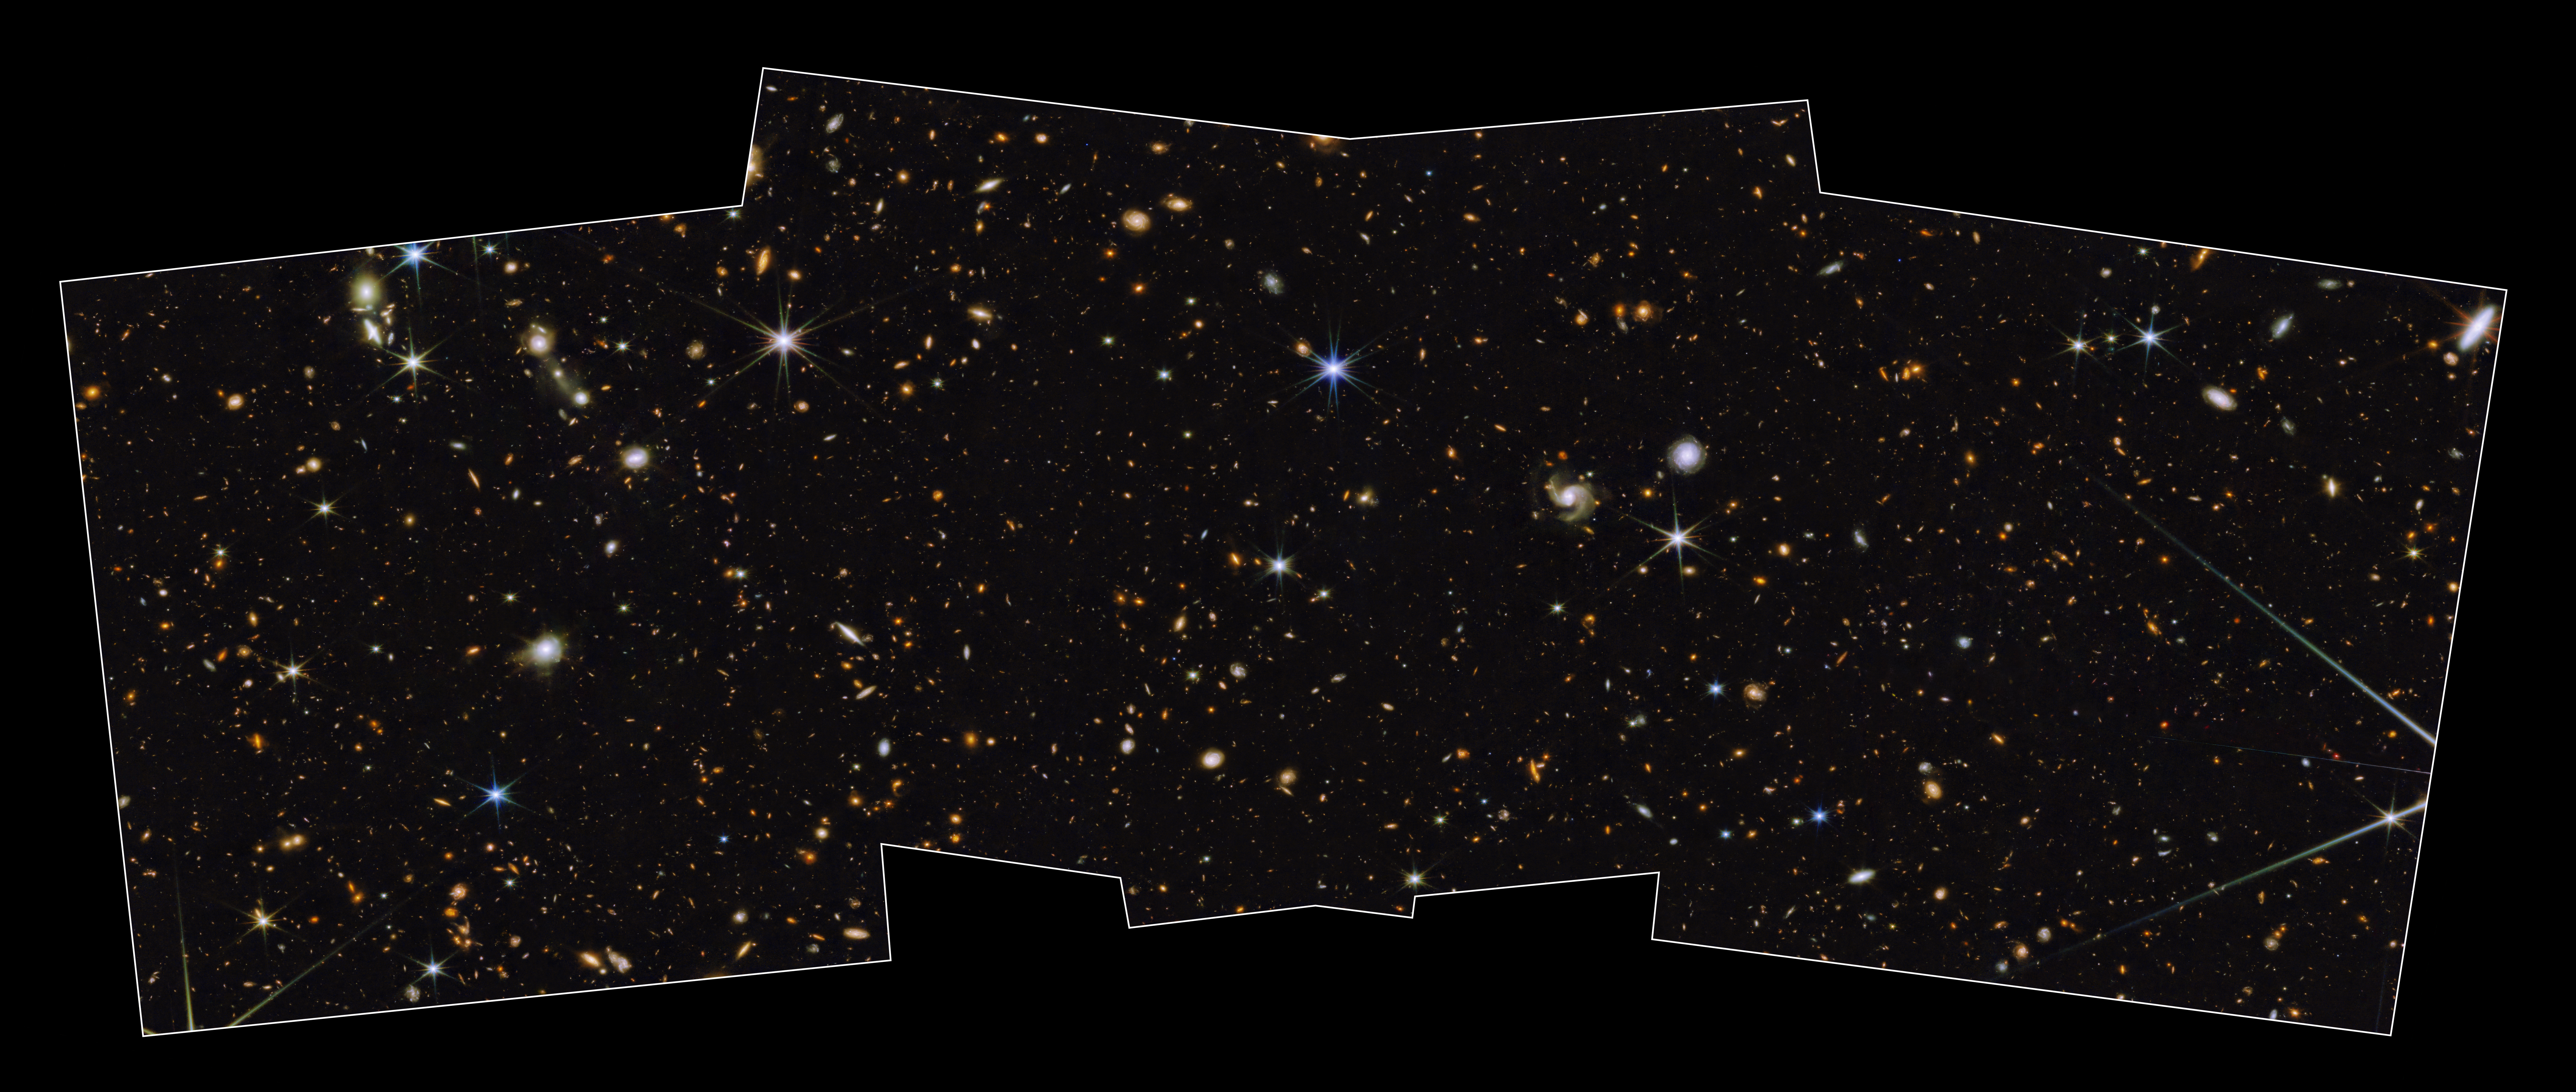

North Ecliptic Pole Time Domain Field

The NASA/ESA/CSA James Webb Space Telescope has captured one of the first medium-deep wide-field images of the cosmos, featuring a region of the sky known as the North Ecliptic Pole. The image, which accompanies a paper published in the Astronomical Journal, is from the Prime Extragalactic Areas for Reionization and Lensing Science (PEARLS) GTO program.

“Medium-deep” refers to the faintest objects that can be seen in this image, which are about 29th magnitude (1 billion times fainter than what can be seen with the unaided eye), while “wide-field” refers to the total area that will be covered by the program, about one-twelfth the area of the full moon. The image is composed of eight different colors of near-infrared light captured by Webb’s Near-Infrared Camera (NIRCam), augmented with three colors of ultraviolet and visible light from the NASA/ESA Hubble Space Telescope. This beautiful color image unveils in unprecedented detail and to exquisite depth a universe full of galaxies to the furthest reaches, many of which were previously unseen by Hubble or the largest ground-based telescopes, as well as an assortment of stars within our own Milky Way galaxy. The NIRCam observations will be combined with spectra obtained with Webb’s Near-Infrared Imager and Slitless Spectrograph (NIRISS), allowing the team to search for faint objects with spectral emission lines, which can be used to estimate their distances more accurately.

A swath of sky measuring 2% of the area covered by the full moon was imaged here with NIRCam instrument in eight filters and with Hubble’s Advanced Camera for Surveys (ACS) and Wide-Field Camera 3 (WFC3) in three filters that together span the 0.25 – 5-micron wavelength range. This image represents a portion of the full PEARLS field, which will be about four times larger. Thousands of galaxies over an enormous range in distance and time are seen in exquisite detail, many for the first time. Light from the most distant galaxies has traveled almost 13.5 billion years to reach us. Because this image is a combination of multiple exposures, some stars show additional diffraction spikes.

This representative-color image was created using Hubble filters F275W (purple), F435W (blue), and F606W (blue); and Webb filters F090W (cyan), F115W (green), F150W (green), F200W (green), F277W (yellow), F356W (yellow), F410M (orange), and F444W (red).

Credit: NASA, ESA, CSA, A. Pagan (STScI) & R. Jansen (ASU)